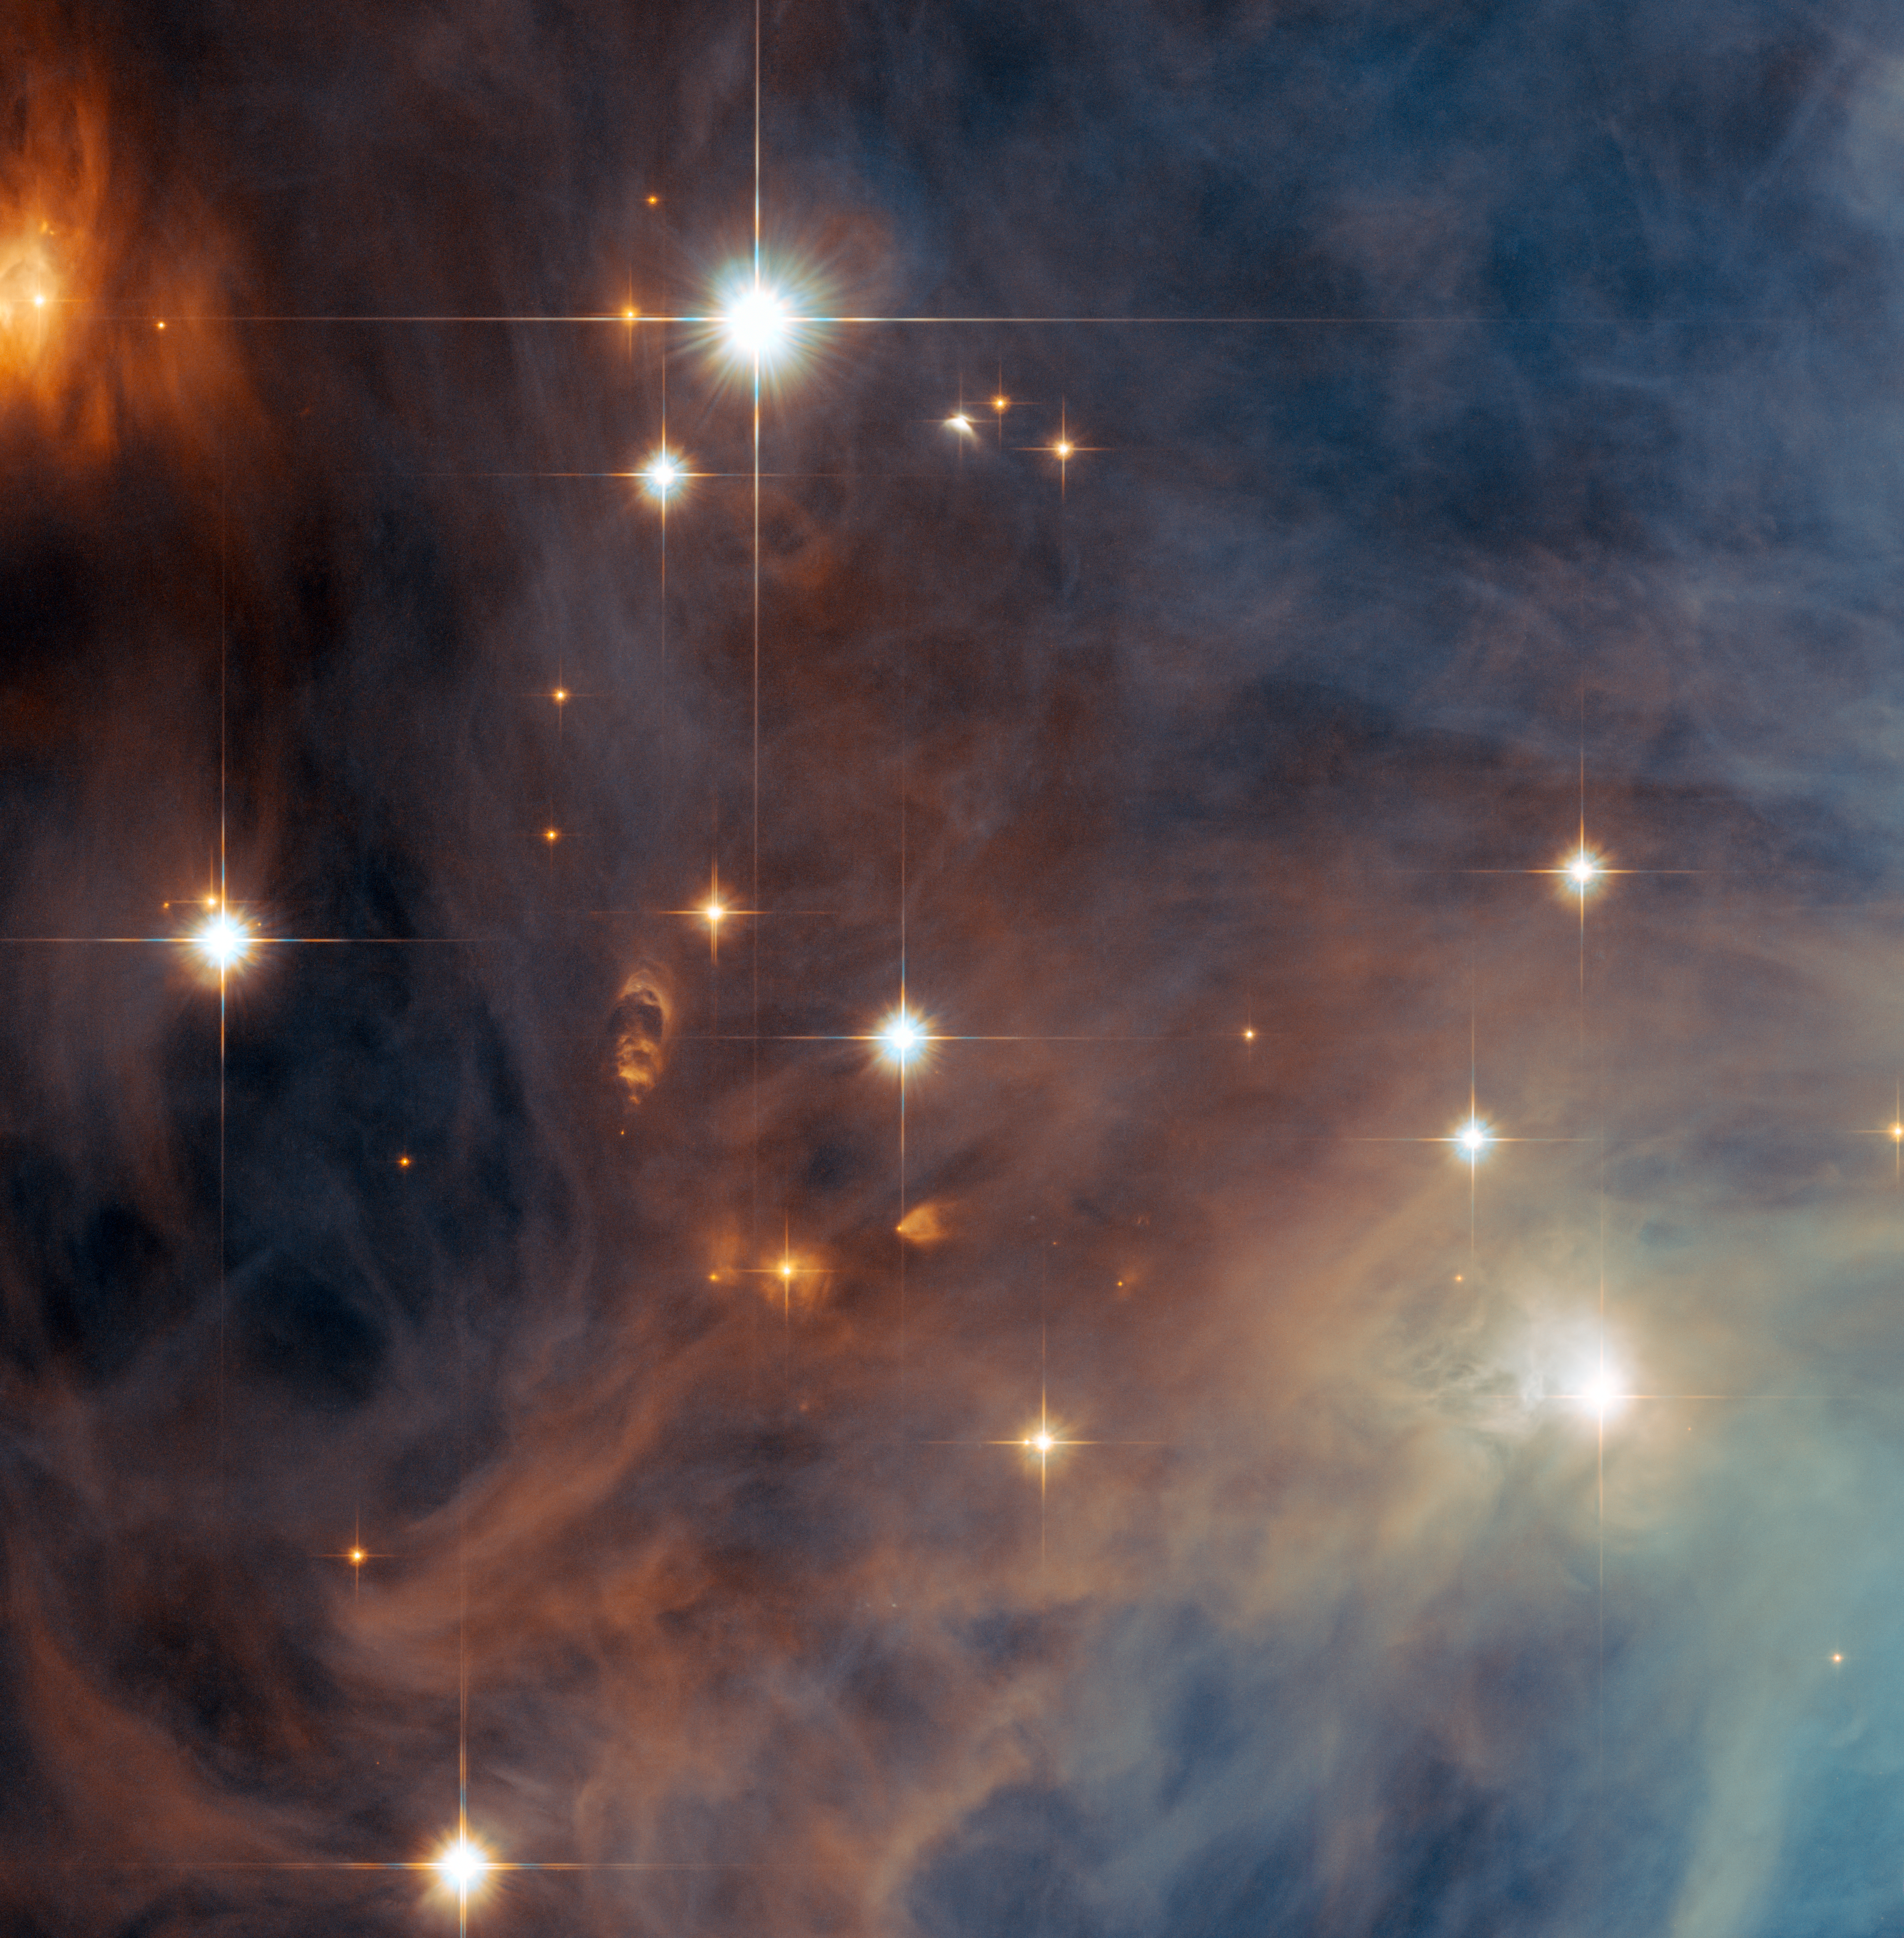

Orion’s lesser-known nebula takes centre stage

The NASA/ESA Hubble Space Telescope has taken a close-up view of an outer part of the Orion Nebula’s little brother, Messier 43. This nebula, which is sometimes referred to as De Mairan’s Nebula after its discoverer, is separated from the famous Orion Nebula (Messier 42) by only a dark lane of dust. Both nebulae are part of the massive stellar nursery called the Orion molecular cloud complex, which includes several other nebulae, such as the Horsehead Nebula (Barnard 33) and the Flame Nebula (NGC 2024).

The Orion molecular cloud complex is about 1400 light-years away, making it one of the closest massive star formation regions to Earth. Hubble has therefore studied this extraordinary region extensively over the past two decades, monitoring how stellar winds sculpt the clouds of gas, studying young stars and their surroundings and discovering many elusive objects, such as brown dwarf stars.

This view shows several of the brilliant hot young stars in this less-studied region and it also reveals many of the curious features around even younger stars that are still cocooned by dust.

This picture was created from images taken using the Wide Field Channel of Hubble’s Advanced Camera for Surveys. Images through yellow (F555W, coloured blue) and near-infrared (F814W, coloured red) filters were combined. The exposure times were 1000 s per filter and the field of view is about 3.3 arcminutes across.

Credit: ESA/Hubble & NASA